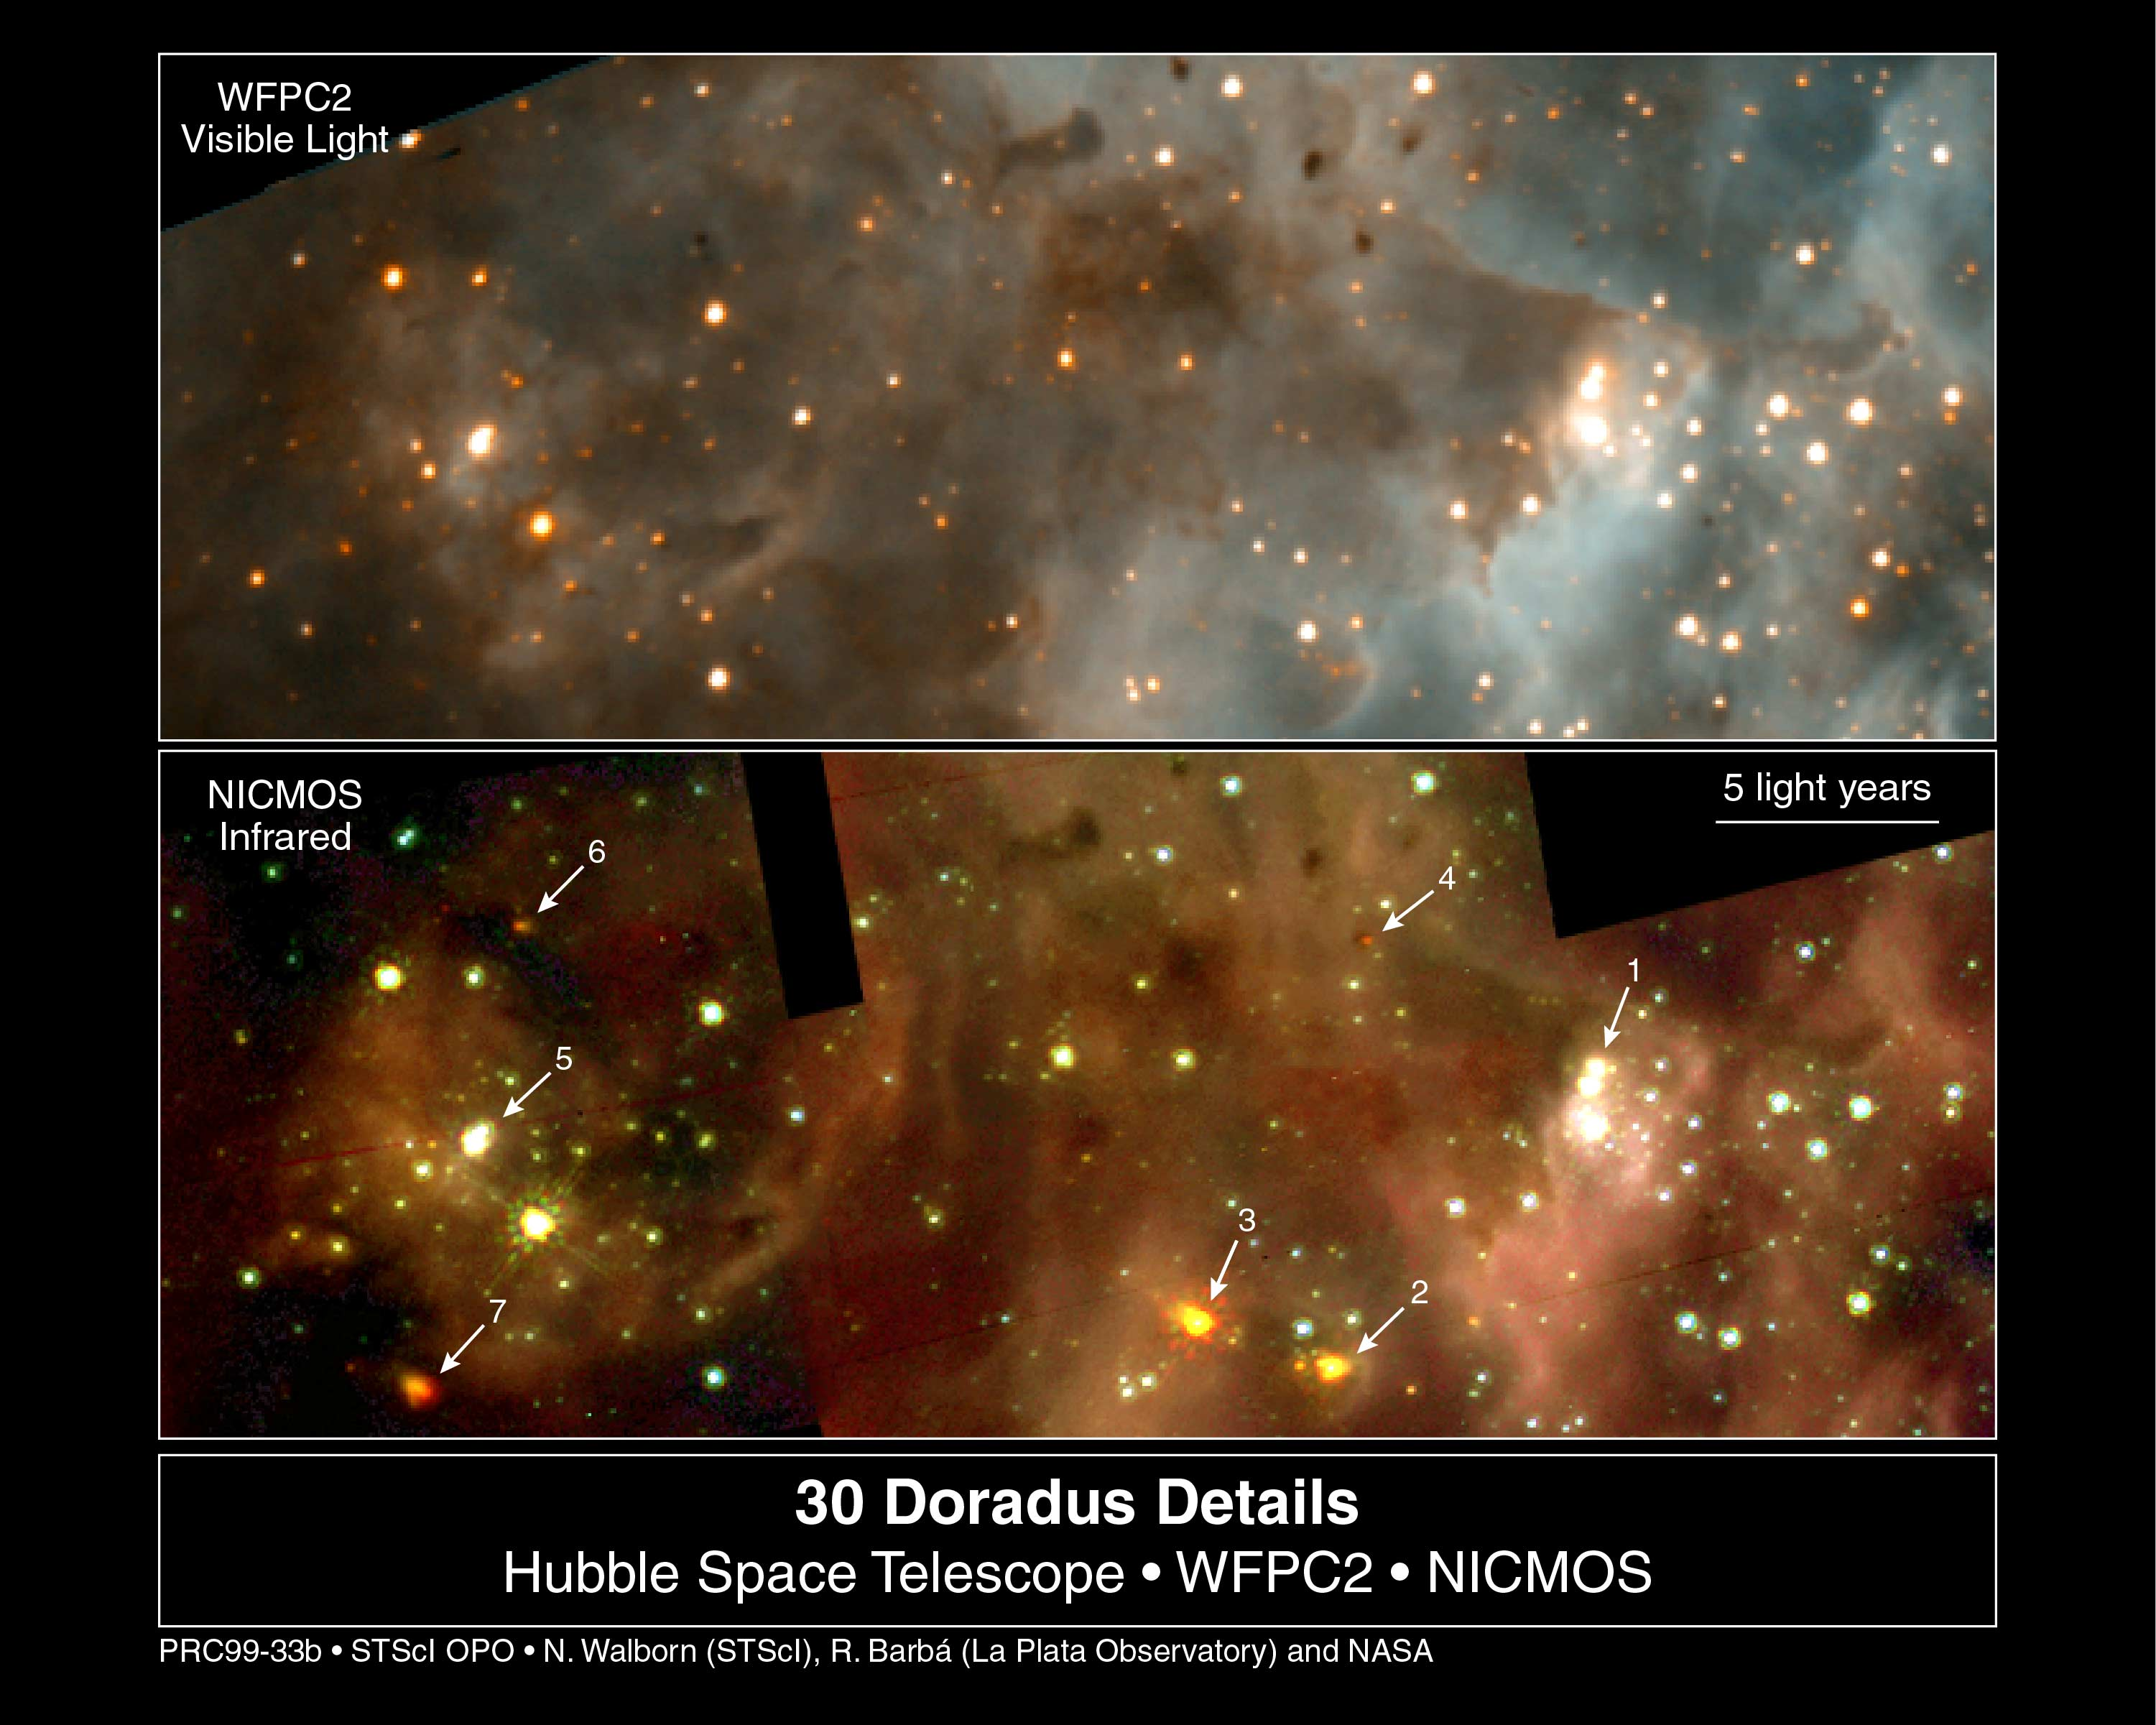

30 Doradus (WFPC2 and NICMOS)

These are two views of a highly active region of star birth located northeast of the central cluster, R136, in 30 Doradus. The orientation and scale are identical for both views.

Top Panel

This is a composite of images in two colours taken with the Hubble Space Telescope's visible-light camera, the Wide Field and Planetary Camera 2 (WFPC2).

Bottom Panel

The is a composite of pictures taken through three infrared filters with Hubble's Near Infrared Camera and Multi-Object Spectrometer (NICMOS).

Credit: NASA/ESA/Nolan Walborn ( Space Telescope Science Institute, Baltimore, Md.) and Rodolfo Barba (La Plata Observatory, La Plata, Argentina), NASA/ESA/John Trauger (Jet Propulsion Laboratory, Pasadena, Calif.) and James Westphal (California Institute of Technology, Pasadena, Calif.)